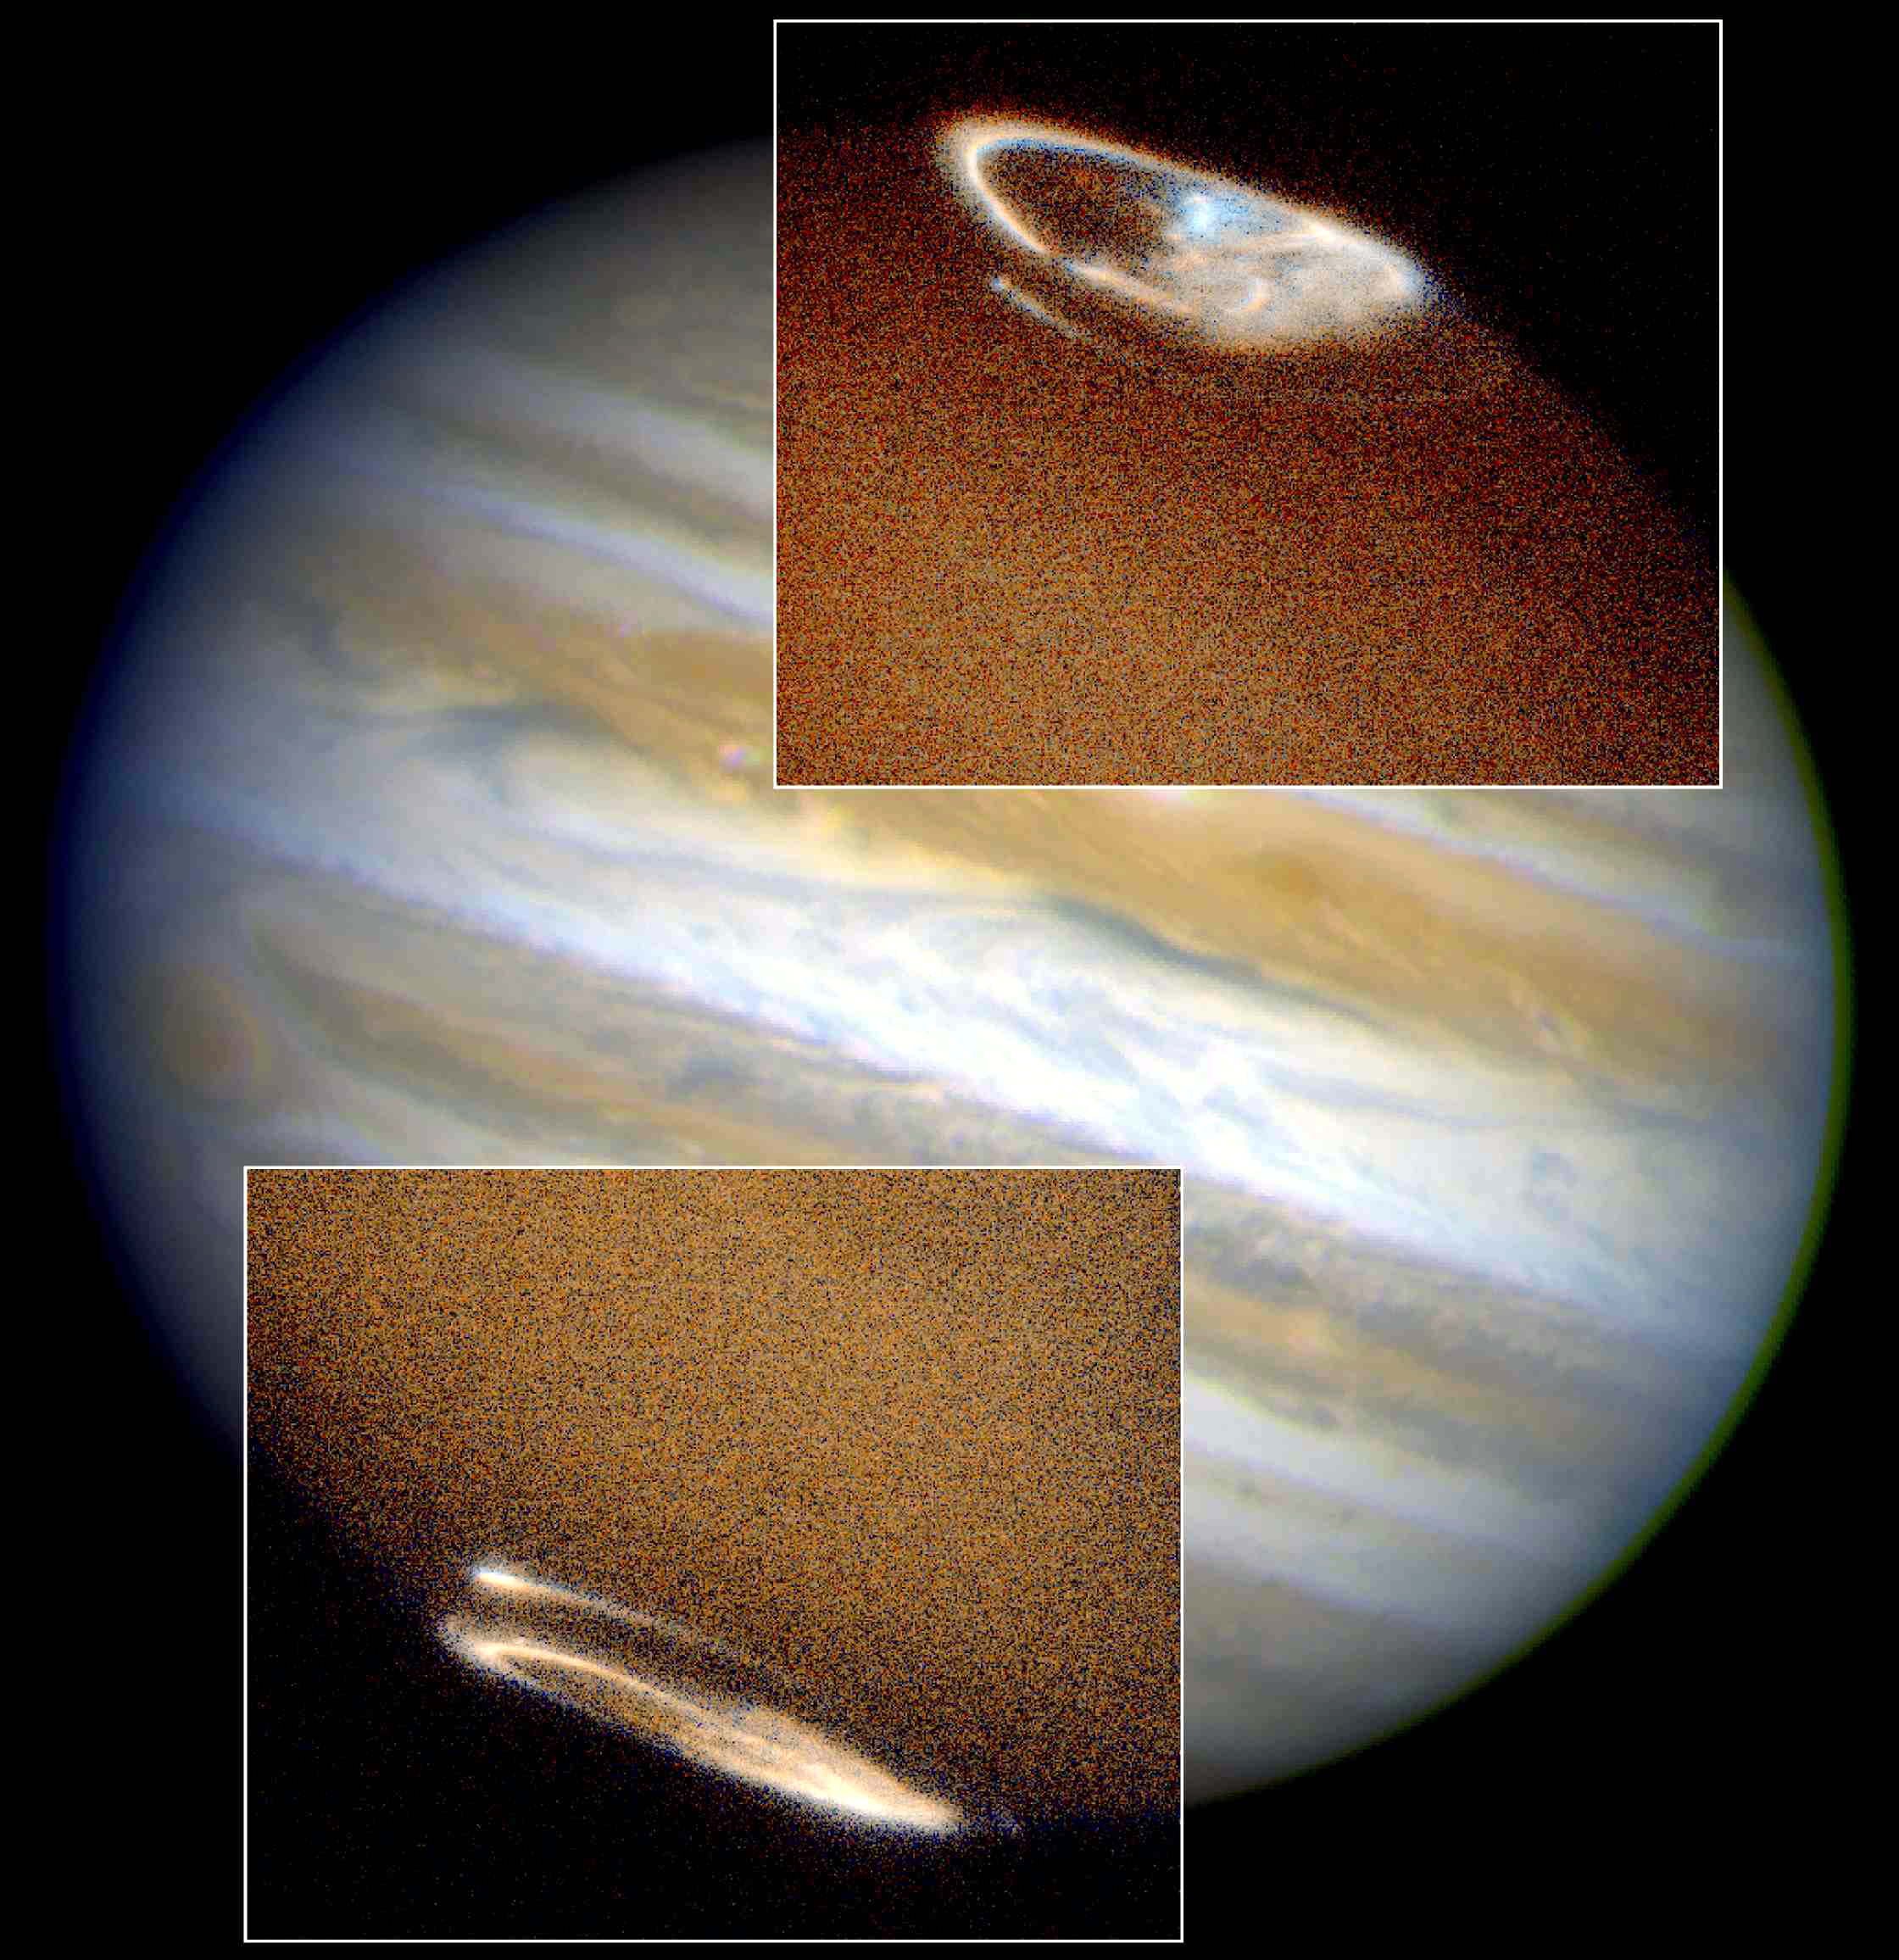

Hubble provides complete view of Jupiter's auroras

The NASA/ESA Hubble Space Telescope has captured a complete view of Jupiter's northern and southern aurorae.

Images taken in ultraviolet light by the Space Telescope Imaging Spectrograph (STIS) show both aurorae, the oval- shaped objects in the inset photos.

Credit: John Clarke (University of Michigan), and NASA/ESA